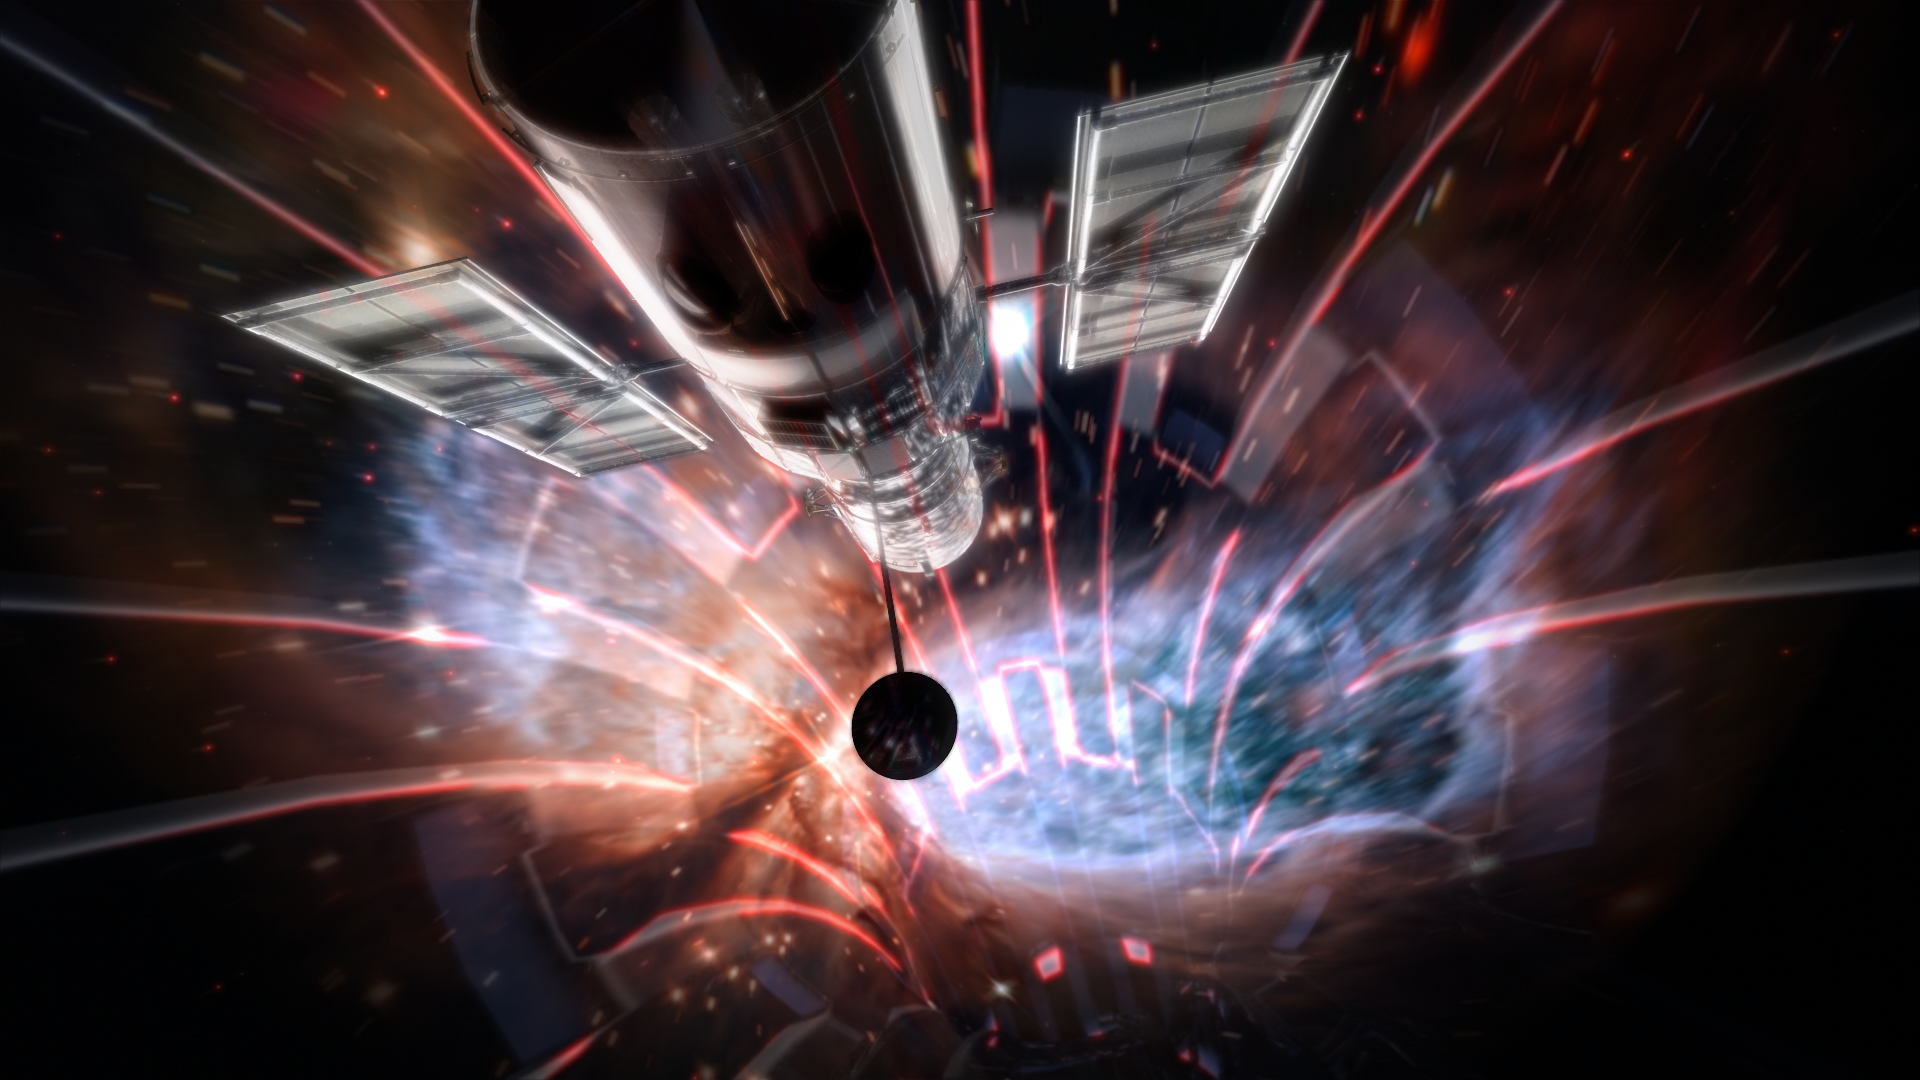

Still from Hubblecast 91: The Future of Hubble, part 1

This is a still from Hubblecast 91 in which scientists speak about the future of Hubble.

Credit: NASA & ESA